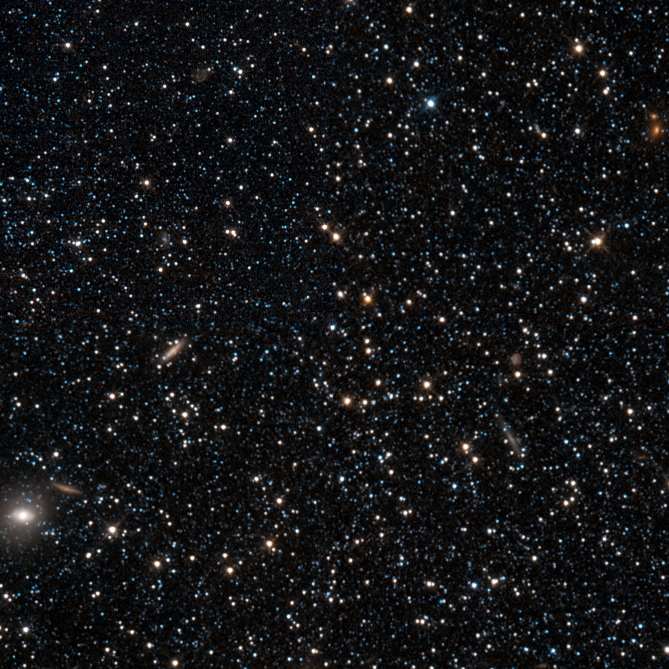

Hubble sizes up a dwarf galaxy

The NASA/ESA Hubble Space Telescope has taken this image of the Phoenix Dwarf Galaxy, which is located 1.4 million light-years away from Earth. It is located in the constellation of Phoenix in the southern sky. The object, a dwarf irregular galaxy, features younger stars in its inner regions and older ones at its outskirts.

Dwarf galaxies are small galaxies composed of a few billion stars, compared to fully-fledged galaxies which can contain hundreds of billions of stars. In the Local Group, there are a number of such dwarf galaxies orbiting the larger galaxies such as the Milky Way or the Andromeda Galaxy. They are thought to have been created by tidal forces in the early stages of the creation of these galaxies, or as a result of collisions between galaxies, forming from ejected streams of material and dark matter from the parent galaxies. The Milky Way galaxy features at least 14 satellite dwarf galaxies orbiting it.

Because of their shape, dwarf irregulars have often been mistaken for globular clusters: they do not feature a bulge or spiral arms like larger galaxies. However, their importance in terms of cosmology is in stark contrast to their unspectacular shapes, as their chemical makeup and high levels of gas are believed to be similar to those of the earliest galaxies that populated the Universe. They are thought to be contemporary versions of some of the remote galaxies observed in deep field galaxy surveys, and can thus help to understand the early stages of galaxy and star formation in the young Universe.

The galaxy was discovered in 1976 by Hans-Emil Schuster and Richard Martin West. Hans-Emil Schuster was acting director of ESO’s La Silla Observatory in Chile and was involved in the selection and testing of the sites for the observatories of both La Silla and Paranal. His great contribution to astronomy and to ESO was recognised by the Chilean government last week when he was awarded the medal of the Order of Bernardo O’Higgins.

Credit: ESA/Hubble & NASA